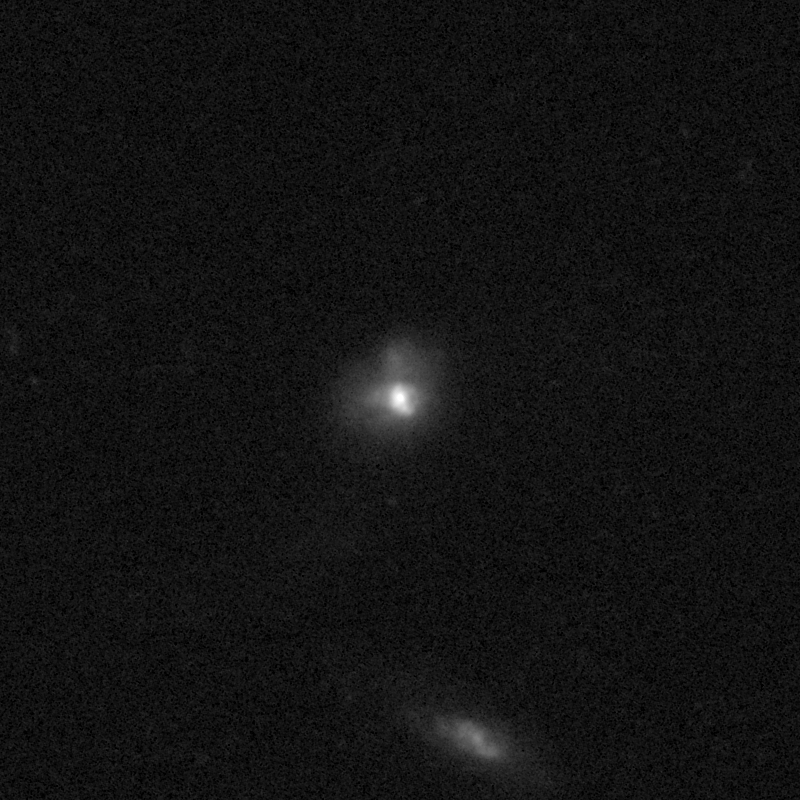

Outflows from merging galaxy J1613+2834

This NASA/ESA Hubble Space Telescope image of the galaxy J1613+2834 shows it is undergoing a firestorm of star birth, as shown by its bright white cores.

This star-making frenzy was ignited by mergers with other galaxies. The odd shape of the galaxy is telltale evidence of a close encounters.

The new Hubble Wide Field Camera 3 observations of this and eleven other galaxies undergoing the same process suggest that energy from the star-birthing frenzies created powerful winds that are blowing out the gas, meaning it is not available to form future generations of stars.

This activity occurred when the Universe was half its current age of 13.7 billion years. The gas-poor galaxies may eventually become so-called red and dead galaxies, composed only of aging stars.

This Hubble false-colour image was processed to bring out important details in the galaxy. The images were taken in 2010.

Credit: NASA, ESA, and P. Sell (Texas Tech University)